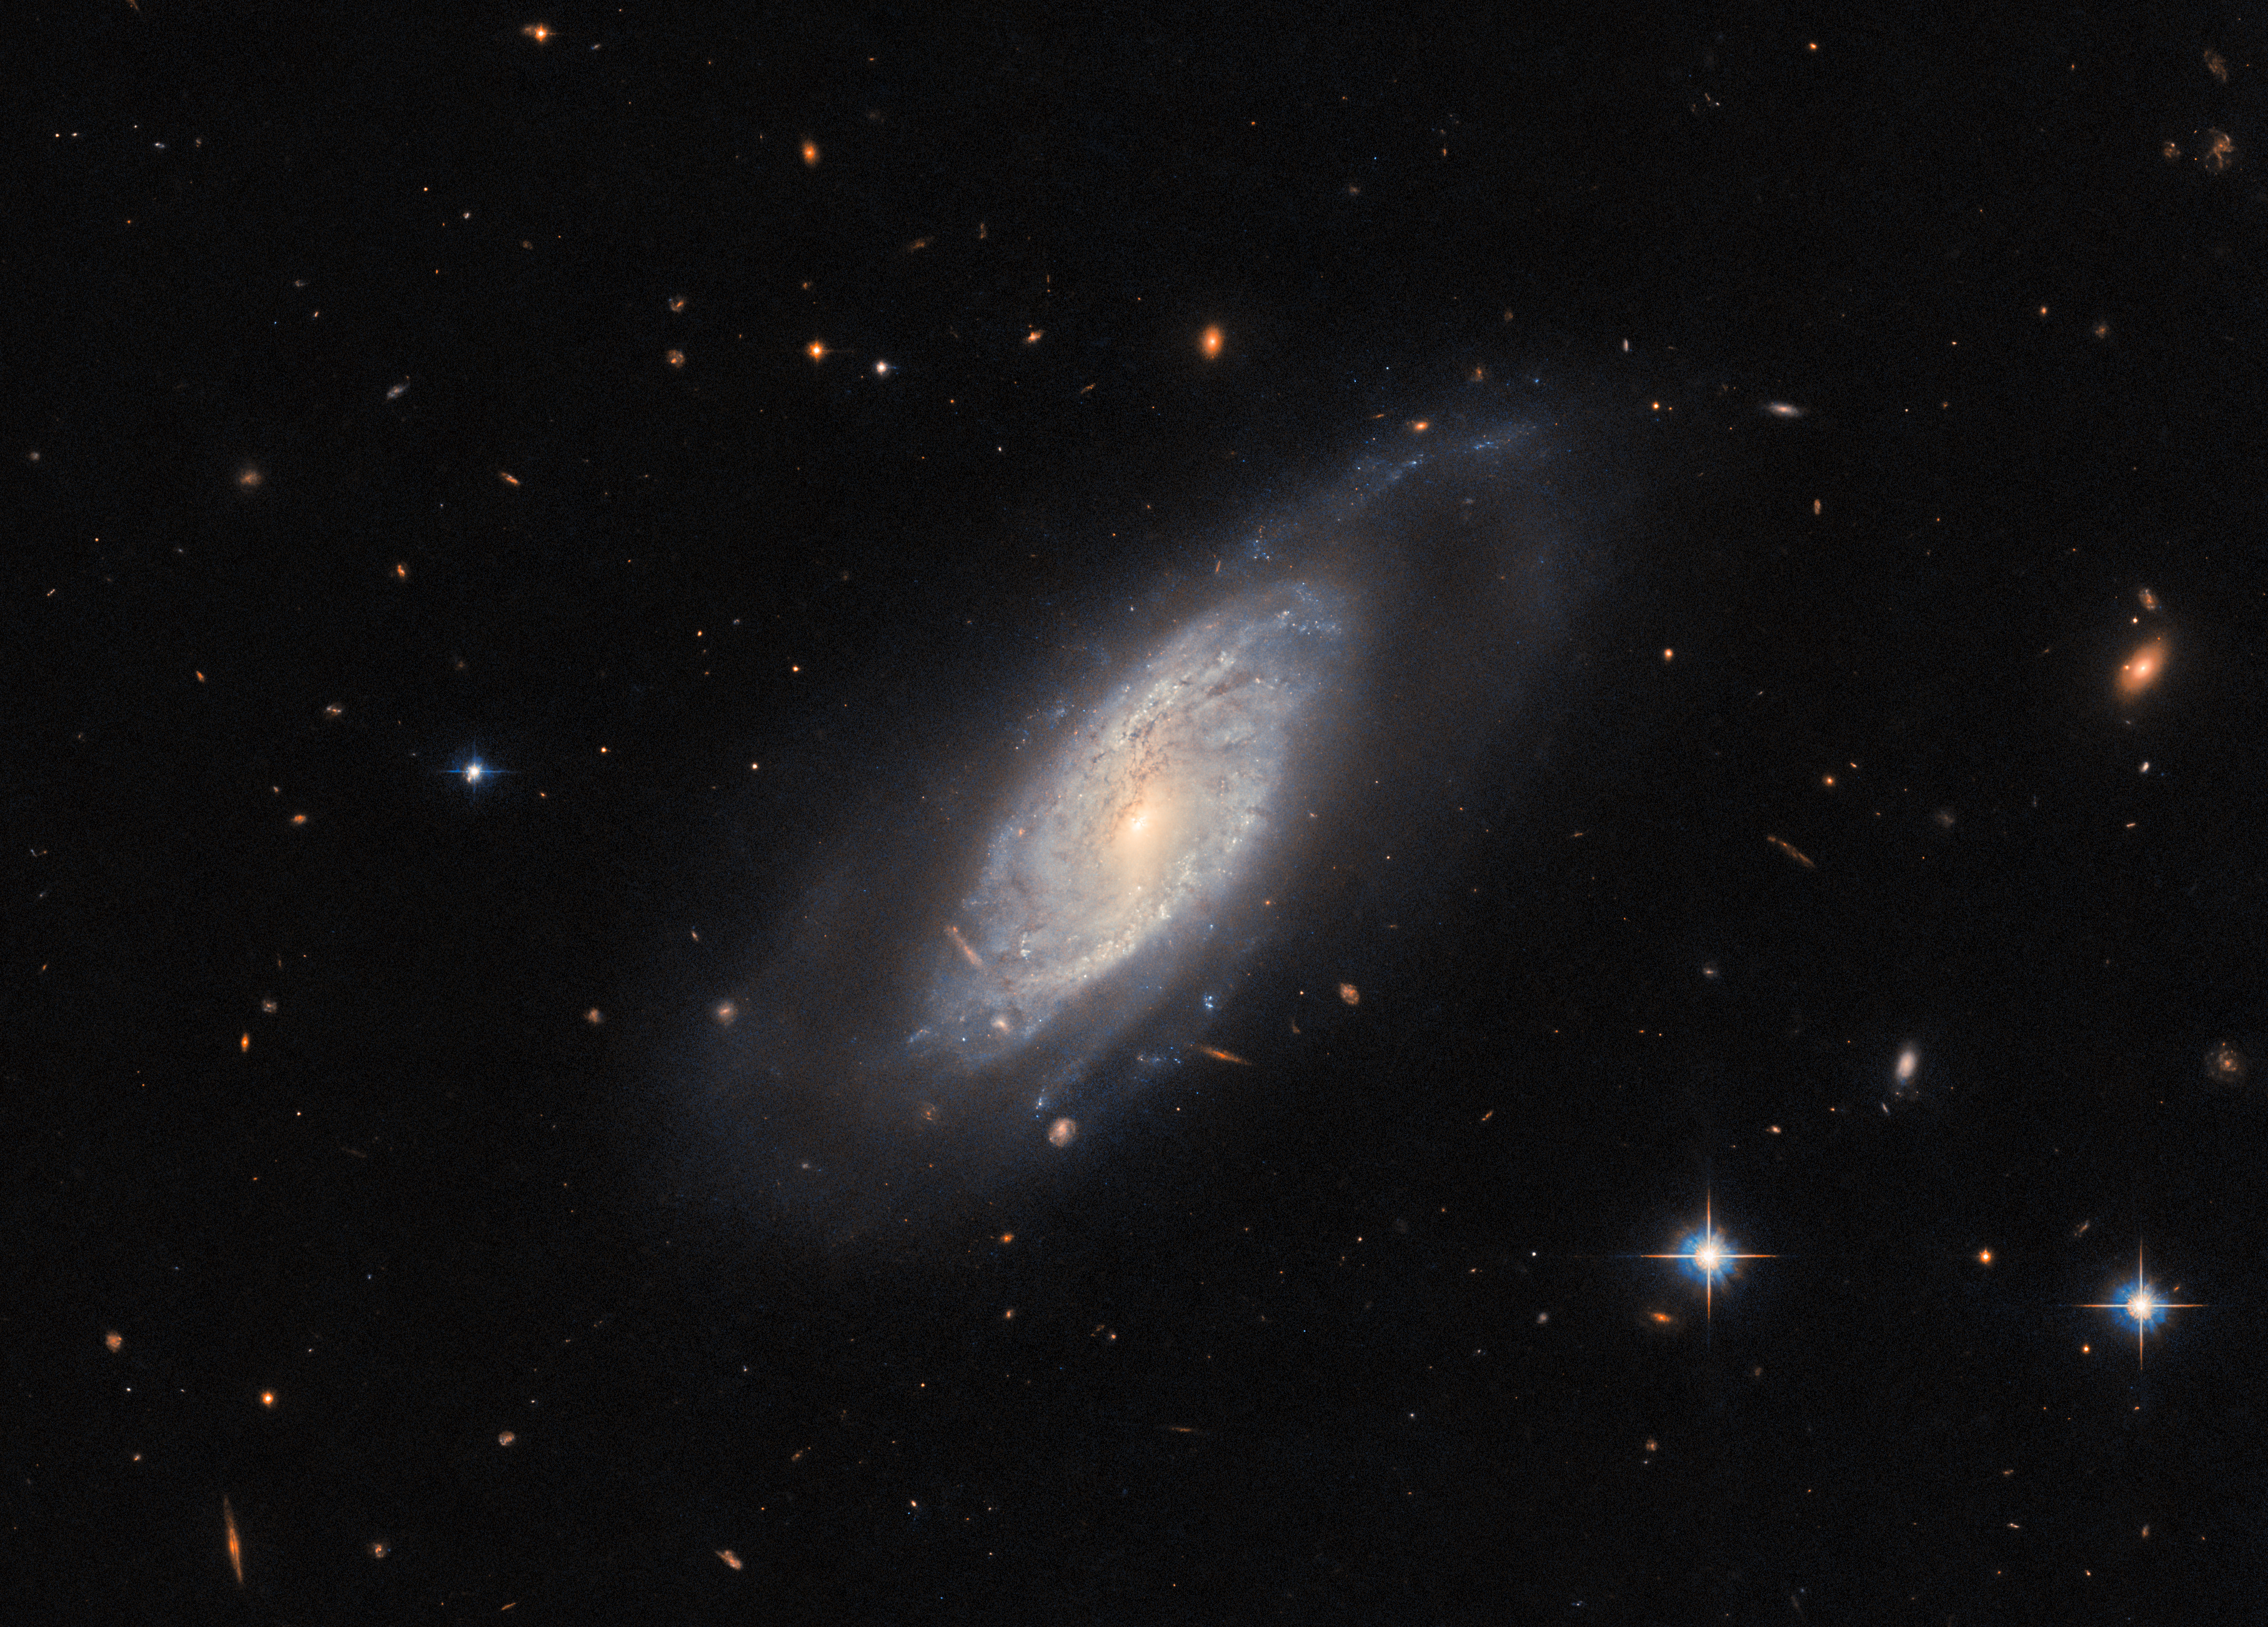

A star forming factory

The celestial object showcased in this week's Hubble Picture of the Week is the spiral galaxy UGC 9684, which lies around 240 million light-years from Earth in the constellation Boötes. This image shows an impressive example of several classic galactic features, including a clear bar in the galaxy's centre, and a halo surrounding its disc.

The impetus for this Hubble image was a study into the host galaxies of Type-II supernovae. These cataclysmic stellar explosions take place throughout the Universe, and are of great interest to astronomers, so automated surveys scan the night sky and attempt to catch sight of them. The supernova which brought UGC 9684 to Hubble's attention occurred during 2020. It has faded from view in this image, which was taken in 2023.

Remarkably, the 2020 supernova in this galaxy isn't the only one that's been seen there — four supernova-like events have been spotted in UGC 9684 since 2006, putting it up there with the most active supernova-producing galaxies. It turns out that UGC 9684 is a quite active star-forming galaxy, calculated as producing one solar mass worth of stars every few years! This level of stellar formation makes UGC 9684 a veritable supernova factory, and a galaxy to watch for astronomers hoping to examine these exceptional events.

Credit: ESA/Hubble & NASA, C. Kilpatrick